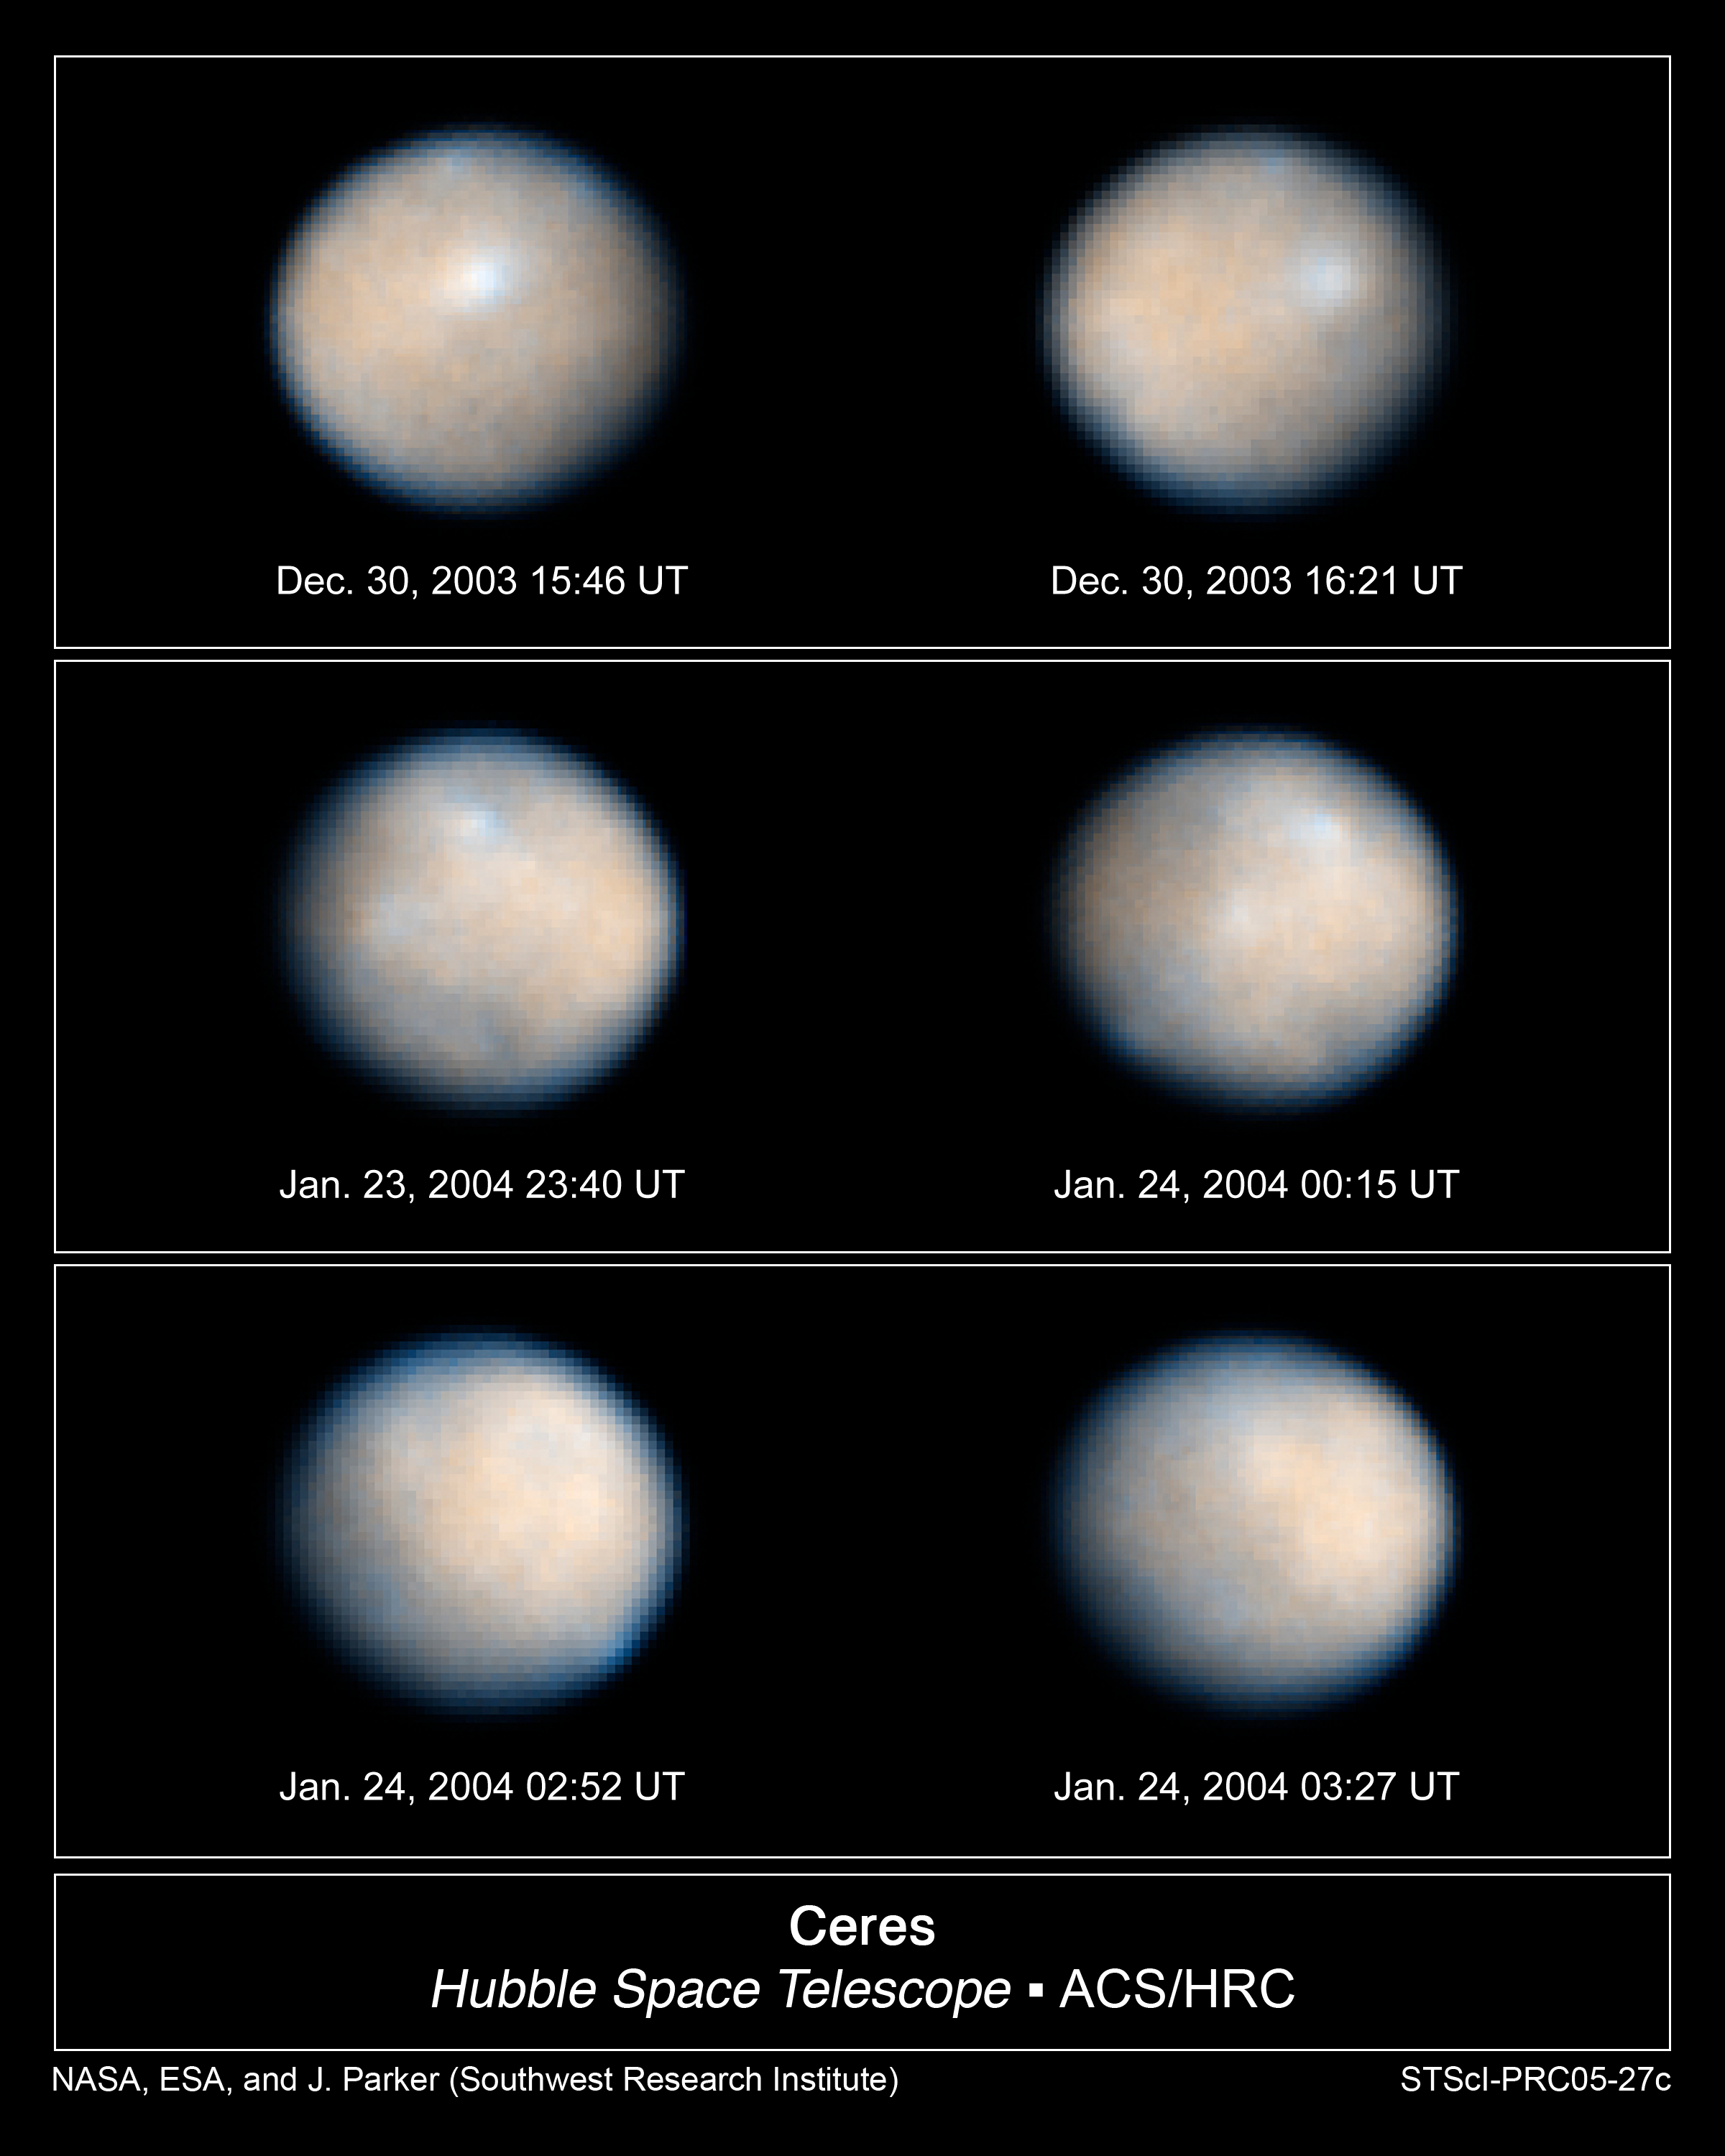

Images of the Asteroid Ceres Rotation

NASA/ESA Hubble Space Telescope took these images of Ceres during its 9-hour rotation.

The colours represent the differences between relatively red and blue regions. These differences may simply be due to variation on the surface among different types of material.

Astronomers enhanced the sharpness in these images to bring out features on Ceres' surface, including brighter and darker regions that could be asteroid impact features. The observations were made in visible and ultraviolet light between December 2003 and January 2004.

Credit: NASA, ESA, J. Parker (Southwest Research Institute), P. Thomas (Cornell University), L. McFadden (University of Maryland, College Park), and M. Mutchler and Z. Levay (STScI)